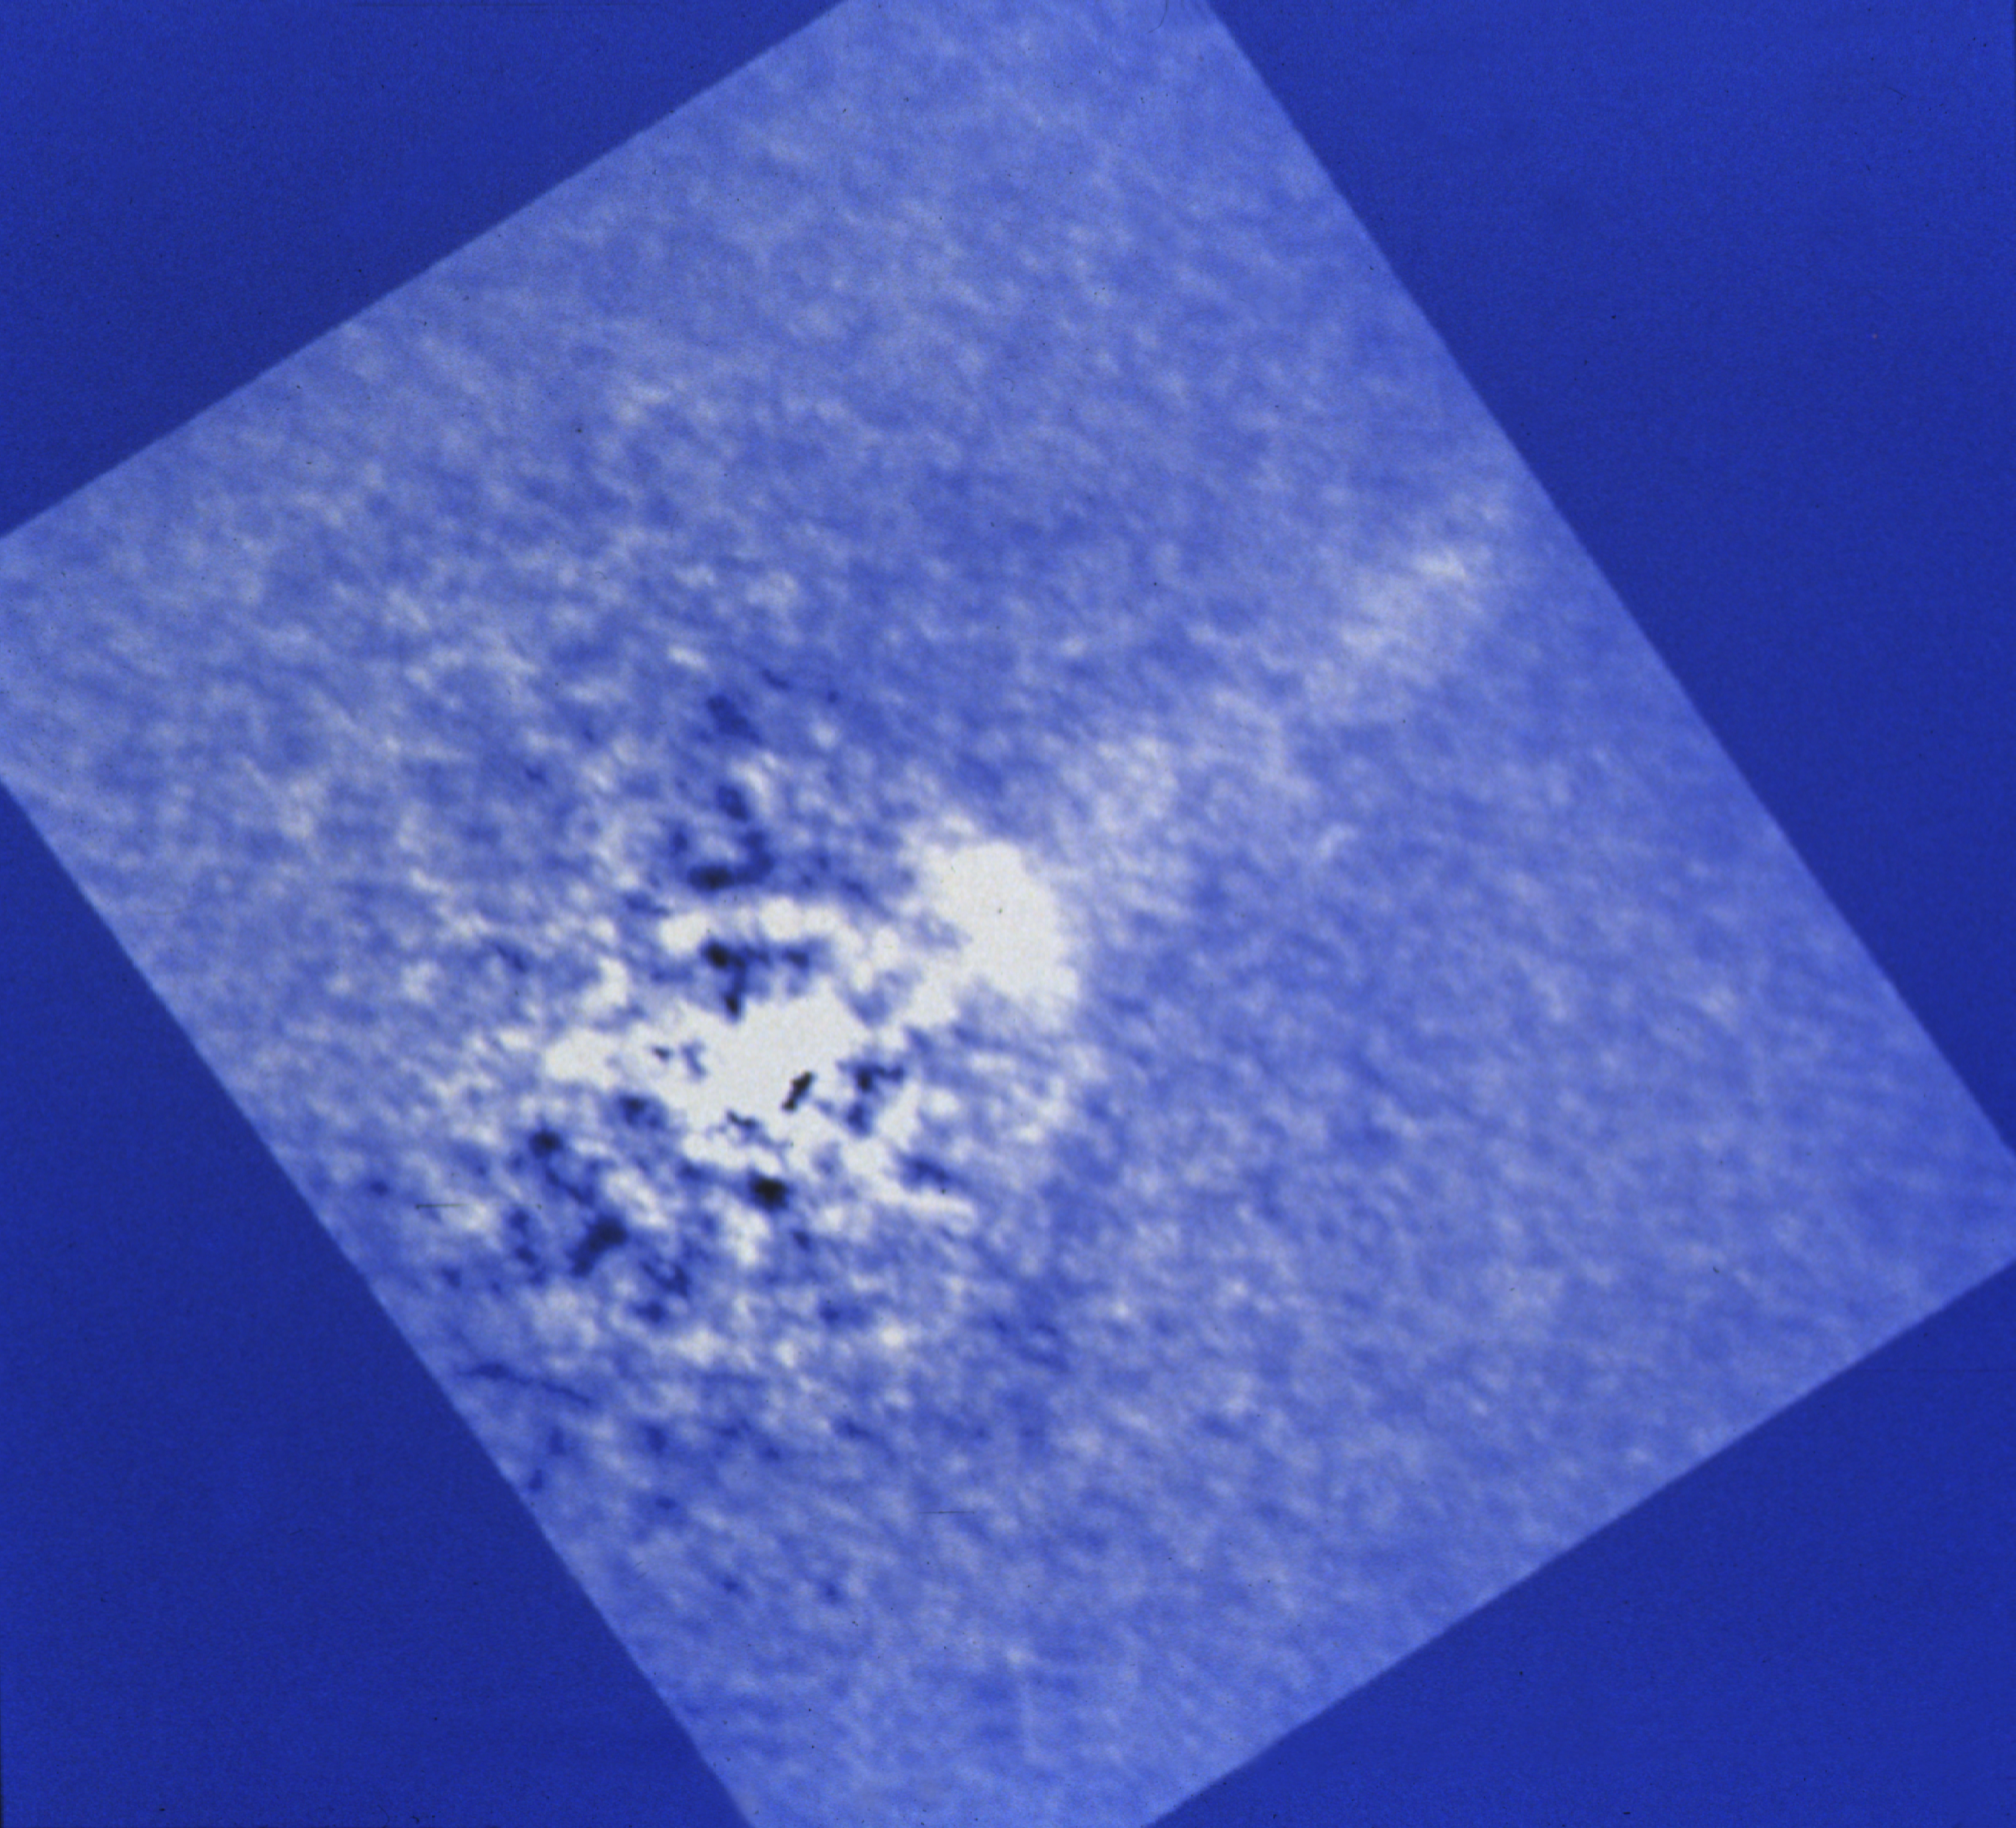

The radio galaxy PKS 0521-36

NASA/ESA Hubble Space Telescope has obtained the most detailed and highest resolution optical images of the radio galaxy PKS 0521-36. The observations were made with the European Space Agency's Faint Object Camera.

The galaxy PKS 0521-36, which is at a distance of about one billion light years from us, is known to be a source of powerful radio emission. It has a quasar-like nucleus that is very bright, both at optical and radio wavelengths. This galaxy belongs to a small group of radio sources which have "jets" that have been seen at both radio and at optical wavelengths. These jets show that high energy material is streaming out from the nuclei at high velocity, often close to the speed of light.

Credit: NASA/ESA